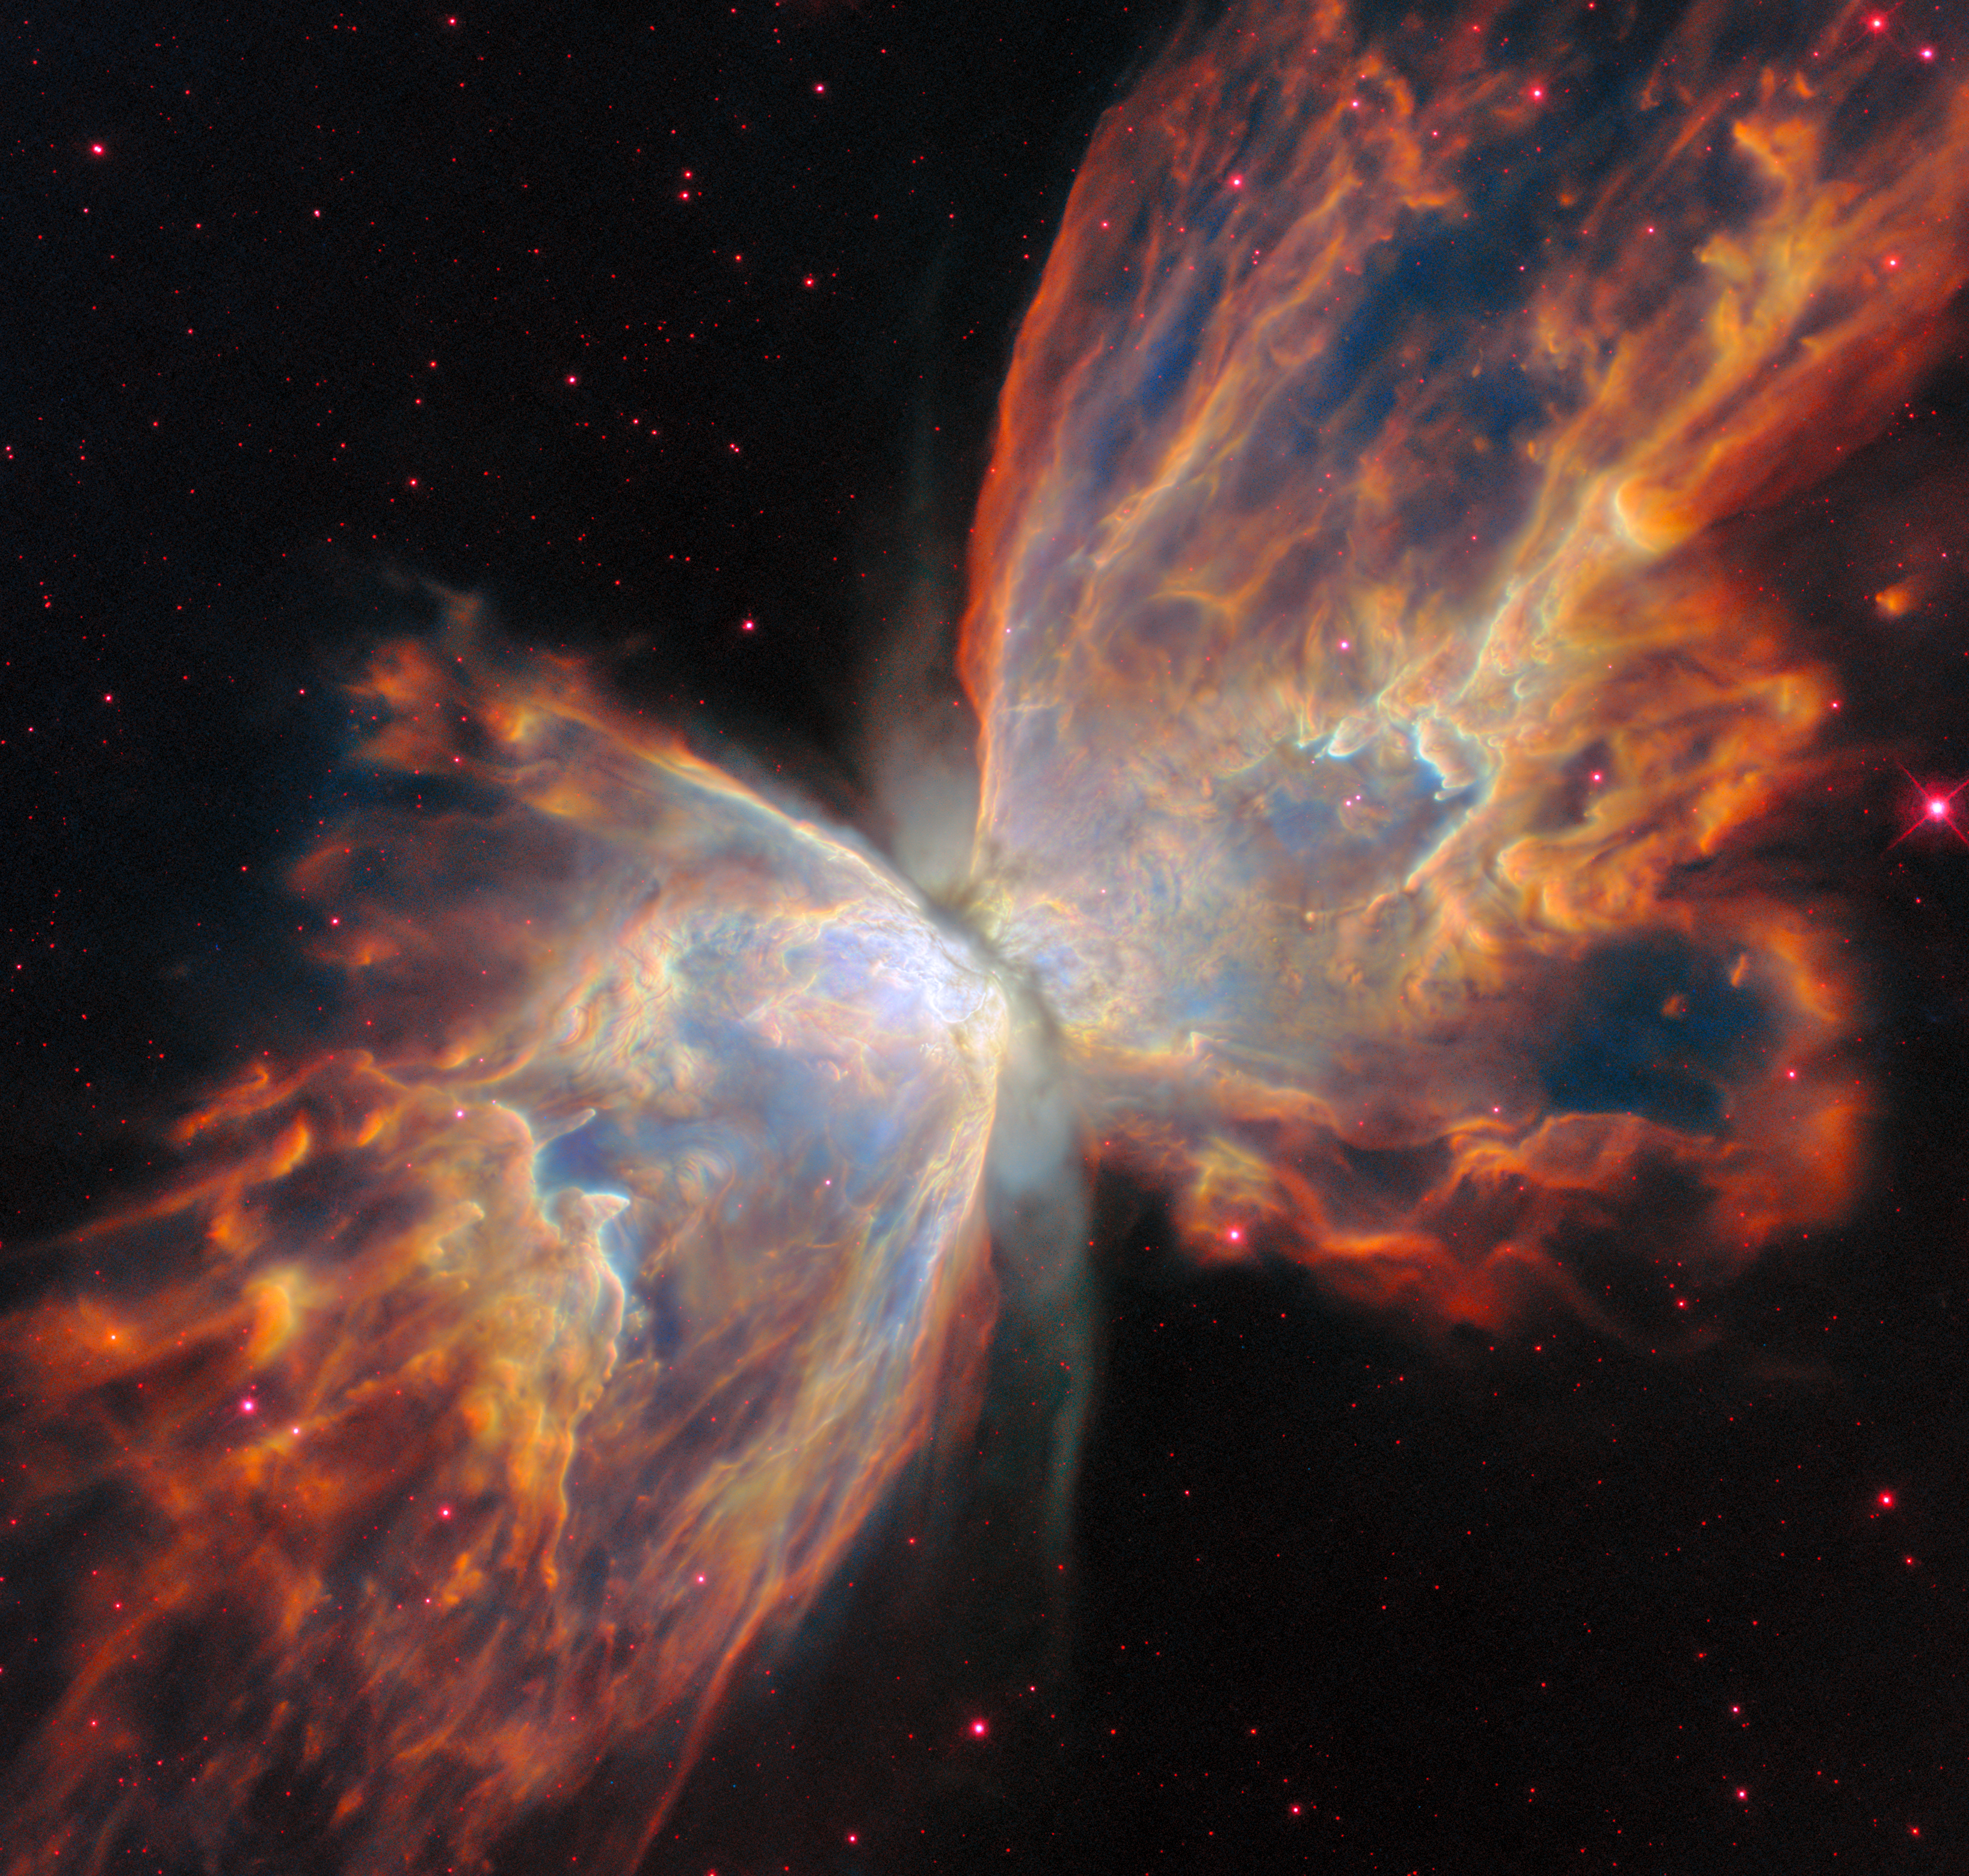

Butterfly Nebula NGC 6302 (Optical Hubble image)

This view of the Butterfly Nebula, NGC 6302, comes from the NASA/ESA Hubble Space Telescope. In the optical wavelengths shown here, the ‘wings’ of the Butterfly Nebula appear clumpy and nearly opaque, blocking most of the background stars from view. The orange colour that suffuses the ‘wings’ comes from ionised nitrogen and hydrogen, while the red accents come from ionised sulfur. Blue comes from hydrogen atoms.

This Hubble image highlights the Butterfly Nebula’s bipolar shape, showing how its two lobes spread in opposite directions, forming the ‘wings’ of the butterfly. A dark band of dusty gas poses as the butterfly’s ‘body’. This band is actually a doughnut-shaped torus that’s being viewed from the side, hiding the nebula’s central star - the ancient core of a Sun-like star that energises the nebula and causes it to glow. The dusty doughnut may be responsible for the nebula’s insectoid shape by preventing gas from flowing outward from the star equally in all directions.

Credit: ESA/Webb, NASA & CSA, K. Noll, J. Kastner, M. Zamani (ESA/Webb)